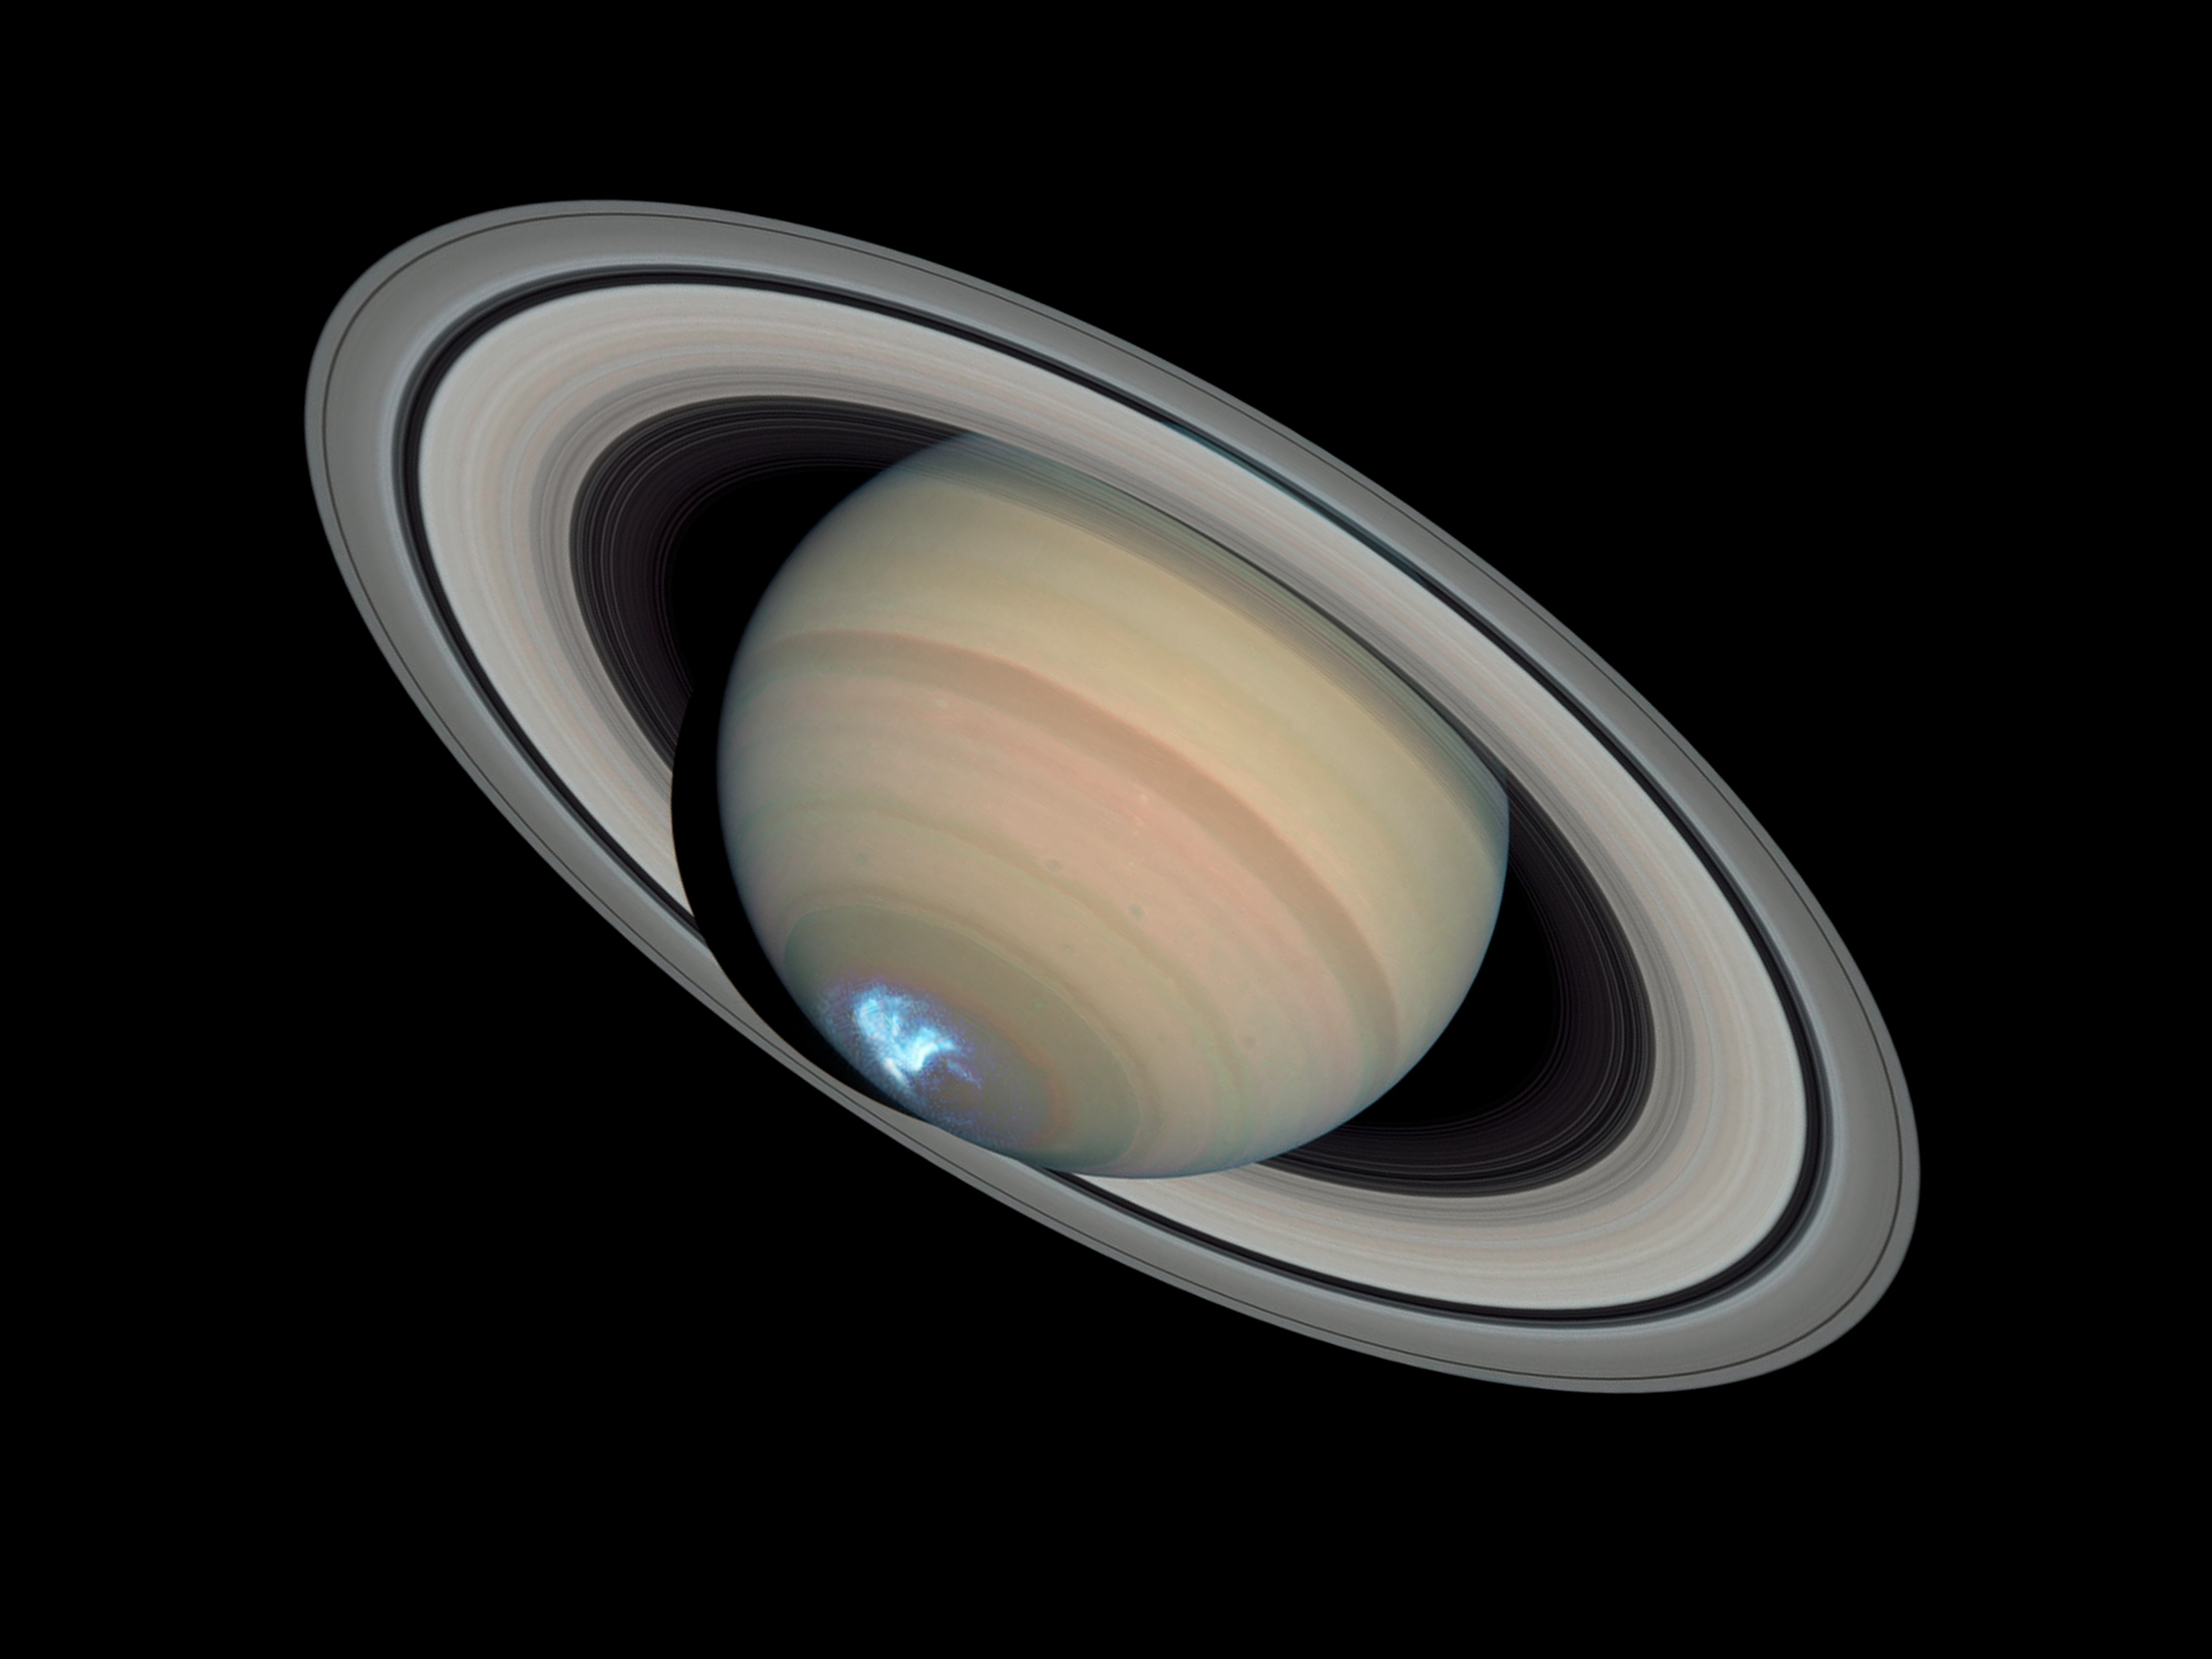

Saturn's dynamic aurorae 1 (Jan 26, 2004)

This is a single image from a sequence of three aurora images.

Astronomers combined ultraviolet images of Saturn's southern polar region with visible-light images of the planet and its rings to make this picture. The auroral display appears blue because of the glow of ultraviolet light. In reality, the aurora would appear red to an observer at Saturn because of the presence of glowing hydrogen in the atmosphere. On Earth, charged particles from the Sun collide with nitrogen and oxygen in the upper atmosphere, creating auroral displays colored mostly green and blue.

The ultraviolet image was taken on Jan. 26, 2004 by Hubble's Space Telescope Imaging Spectrograph. Erich Karkoschka of the University of Arizona, USA used the telescope's Advanced Camera for Surveys on March 22, 2004 to take the visible-light image.

Credit: NASA, ESA, J. Clarke (Boston University, USA), and Z. Levay (STScI)